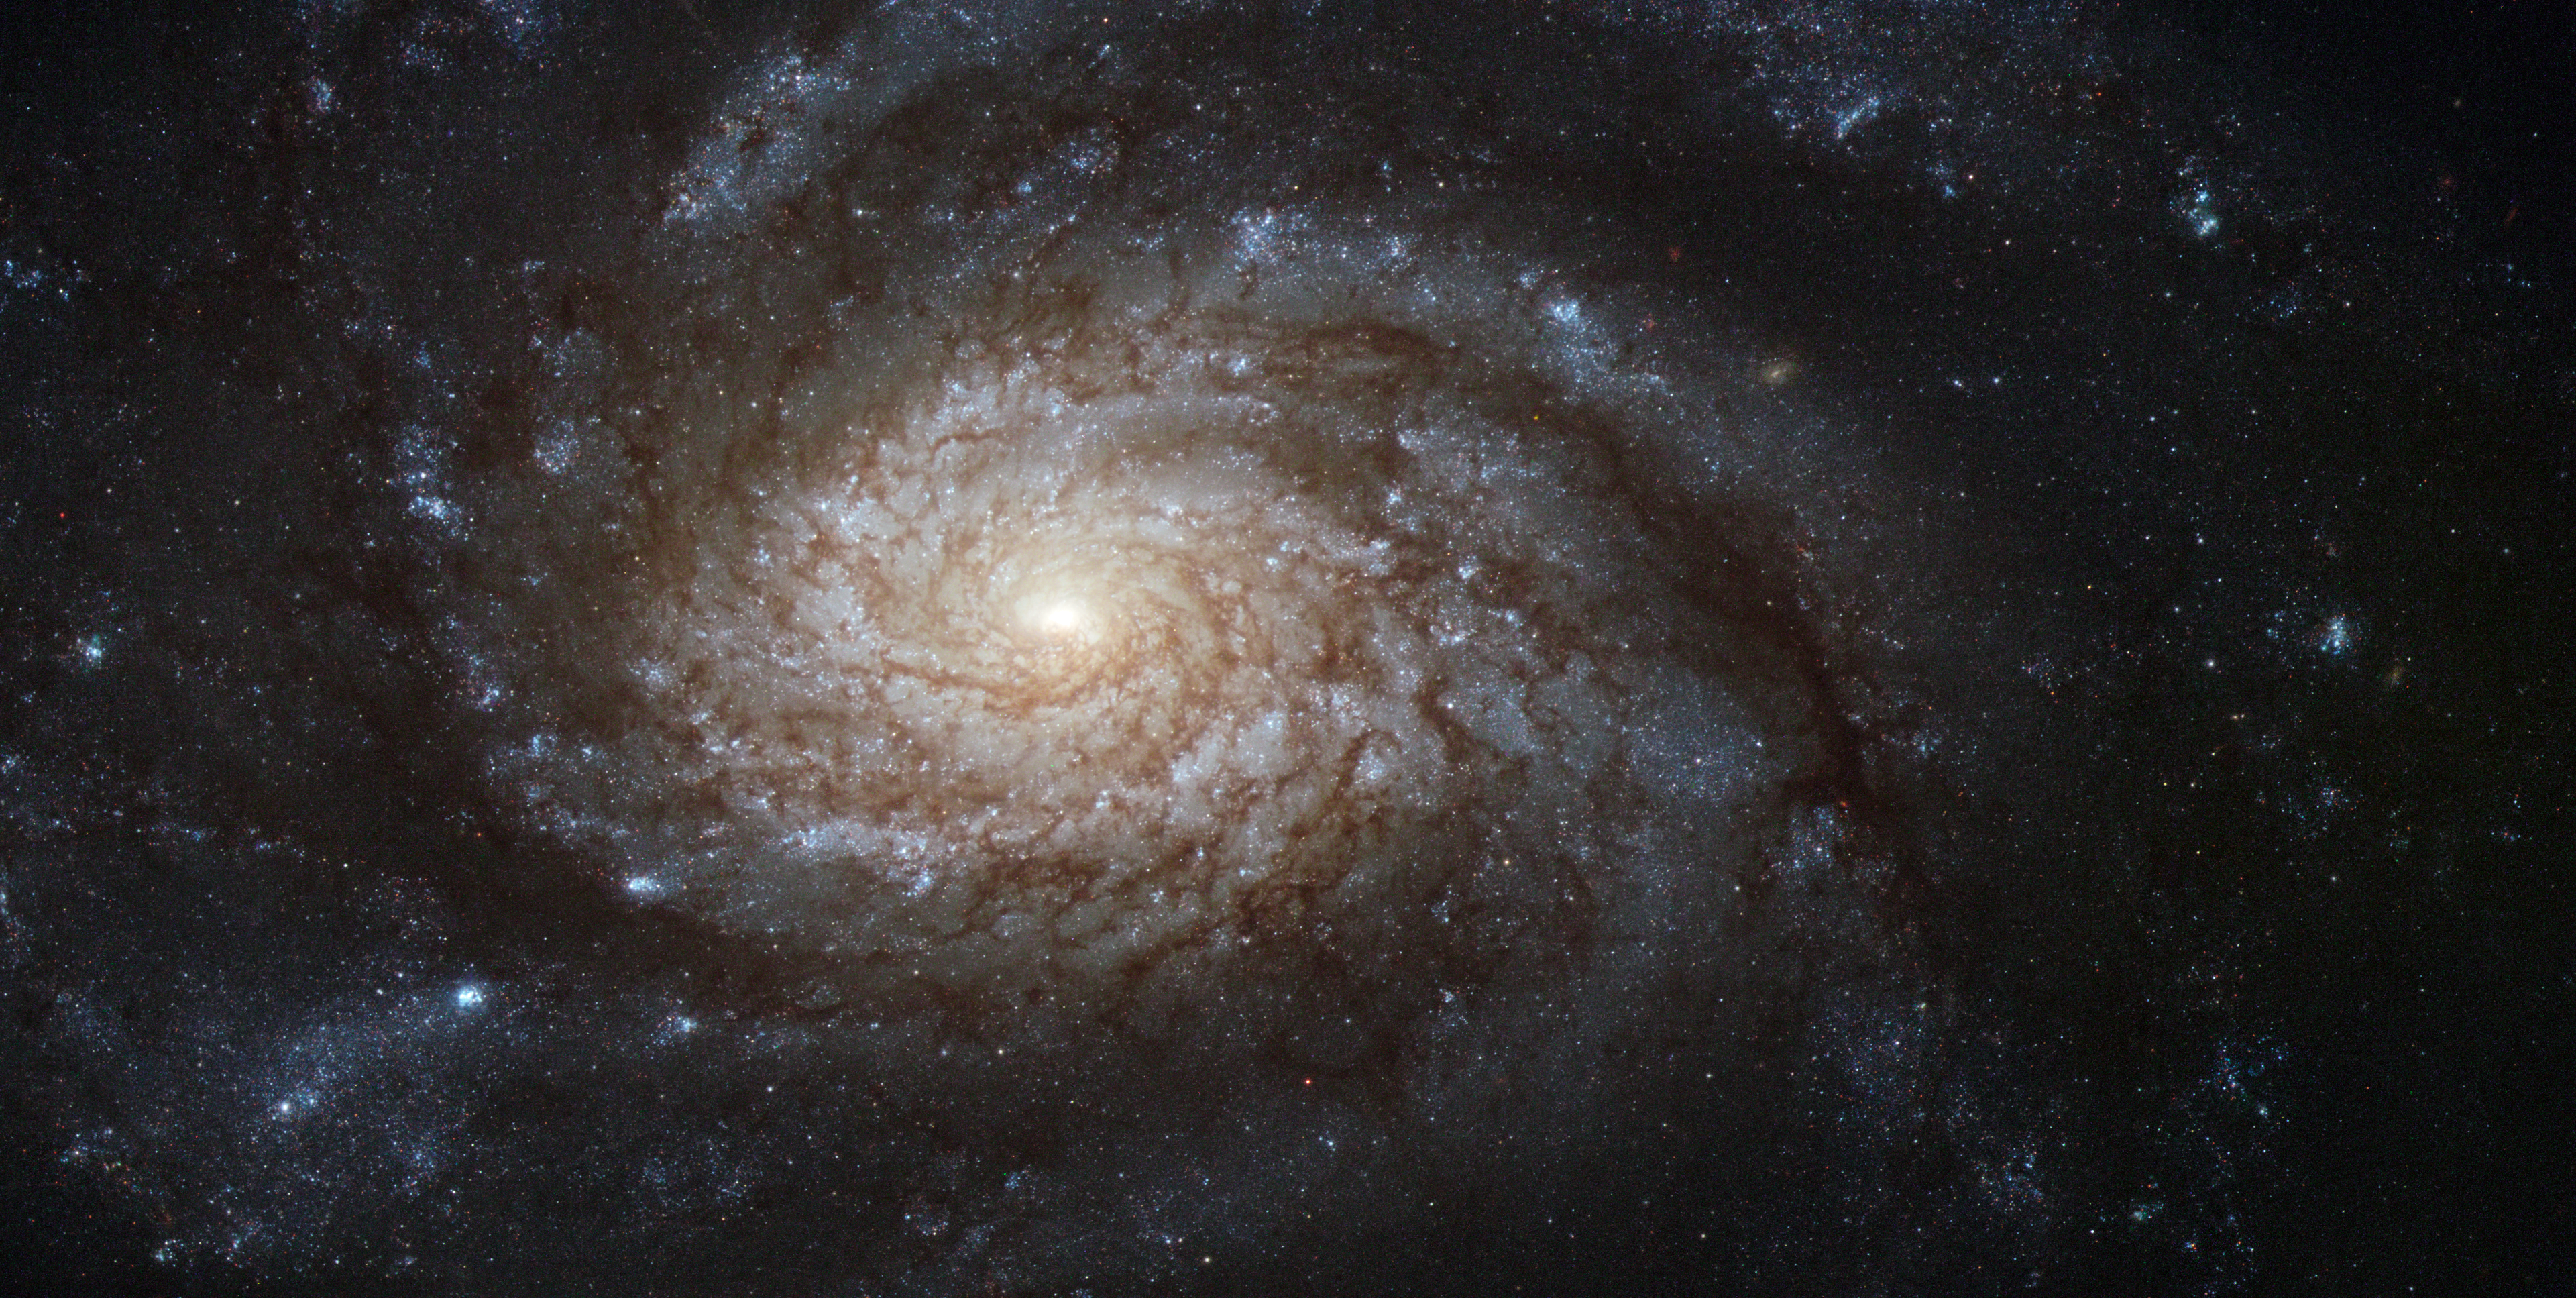

NGC 3810: A picture-perfect spiral

The bright galaxy NGC 3810 demonstrates classical spiral structure in this very detailed image from Hubble. The bright central region is thought to be forming many new stars and is outshining the outer areas of the galaxy by some margin. Further out the galaxy displays strikingly rich dust clouds along its spiral arms. A close look shows that Hubble’s sharp vision also allows many individual stars to be seen. Hot young blue stars show up in giant clusters far from the centre and the arms are also littered with bright red giant stars.

The original images were acquired by astronomers studying a supernova discovered late in the year 2000. It was the second supernova found in the galaxy in quick succession following another discovered in 1997. NGC 3810 is located about 50 million light-years from Earth in the constellation of Leo (the lion). It was discovered by William Herschel in 1784 and is easily seen as a faint smudge in small telescopes.

The NASA/ESA Hubble Space Telescope's Advanced Camera for Surveys captured this image of NGC 3810. It was observed through three filters letting through blue, green and near-infrared list respectively (F435W, F555W and F814W). The exposure times were about seven minutes per filter and the field of view is about 3.4 x 1.7 arcminutes.

Credit: ESA/Hubble and NASA